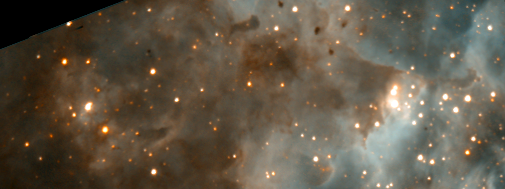

A Grand View of the Birth of 'Hefty' Stars - 30 Doradus Nebula Details (Hubble WFPC2 View)

This image is a composite of images in two colours taken with the Hubble Space Telescope's visible-light camera, the Wide Field and Planetary Camera 2(WFPC2).

Credit: NASA/ESA/John Trauger (Jet Propulsion Laboratory, Pasadena, Calif.) and James Westphal (California Institute of Technology, Pasadena, Calif.)